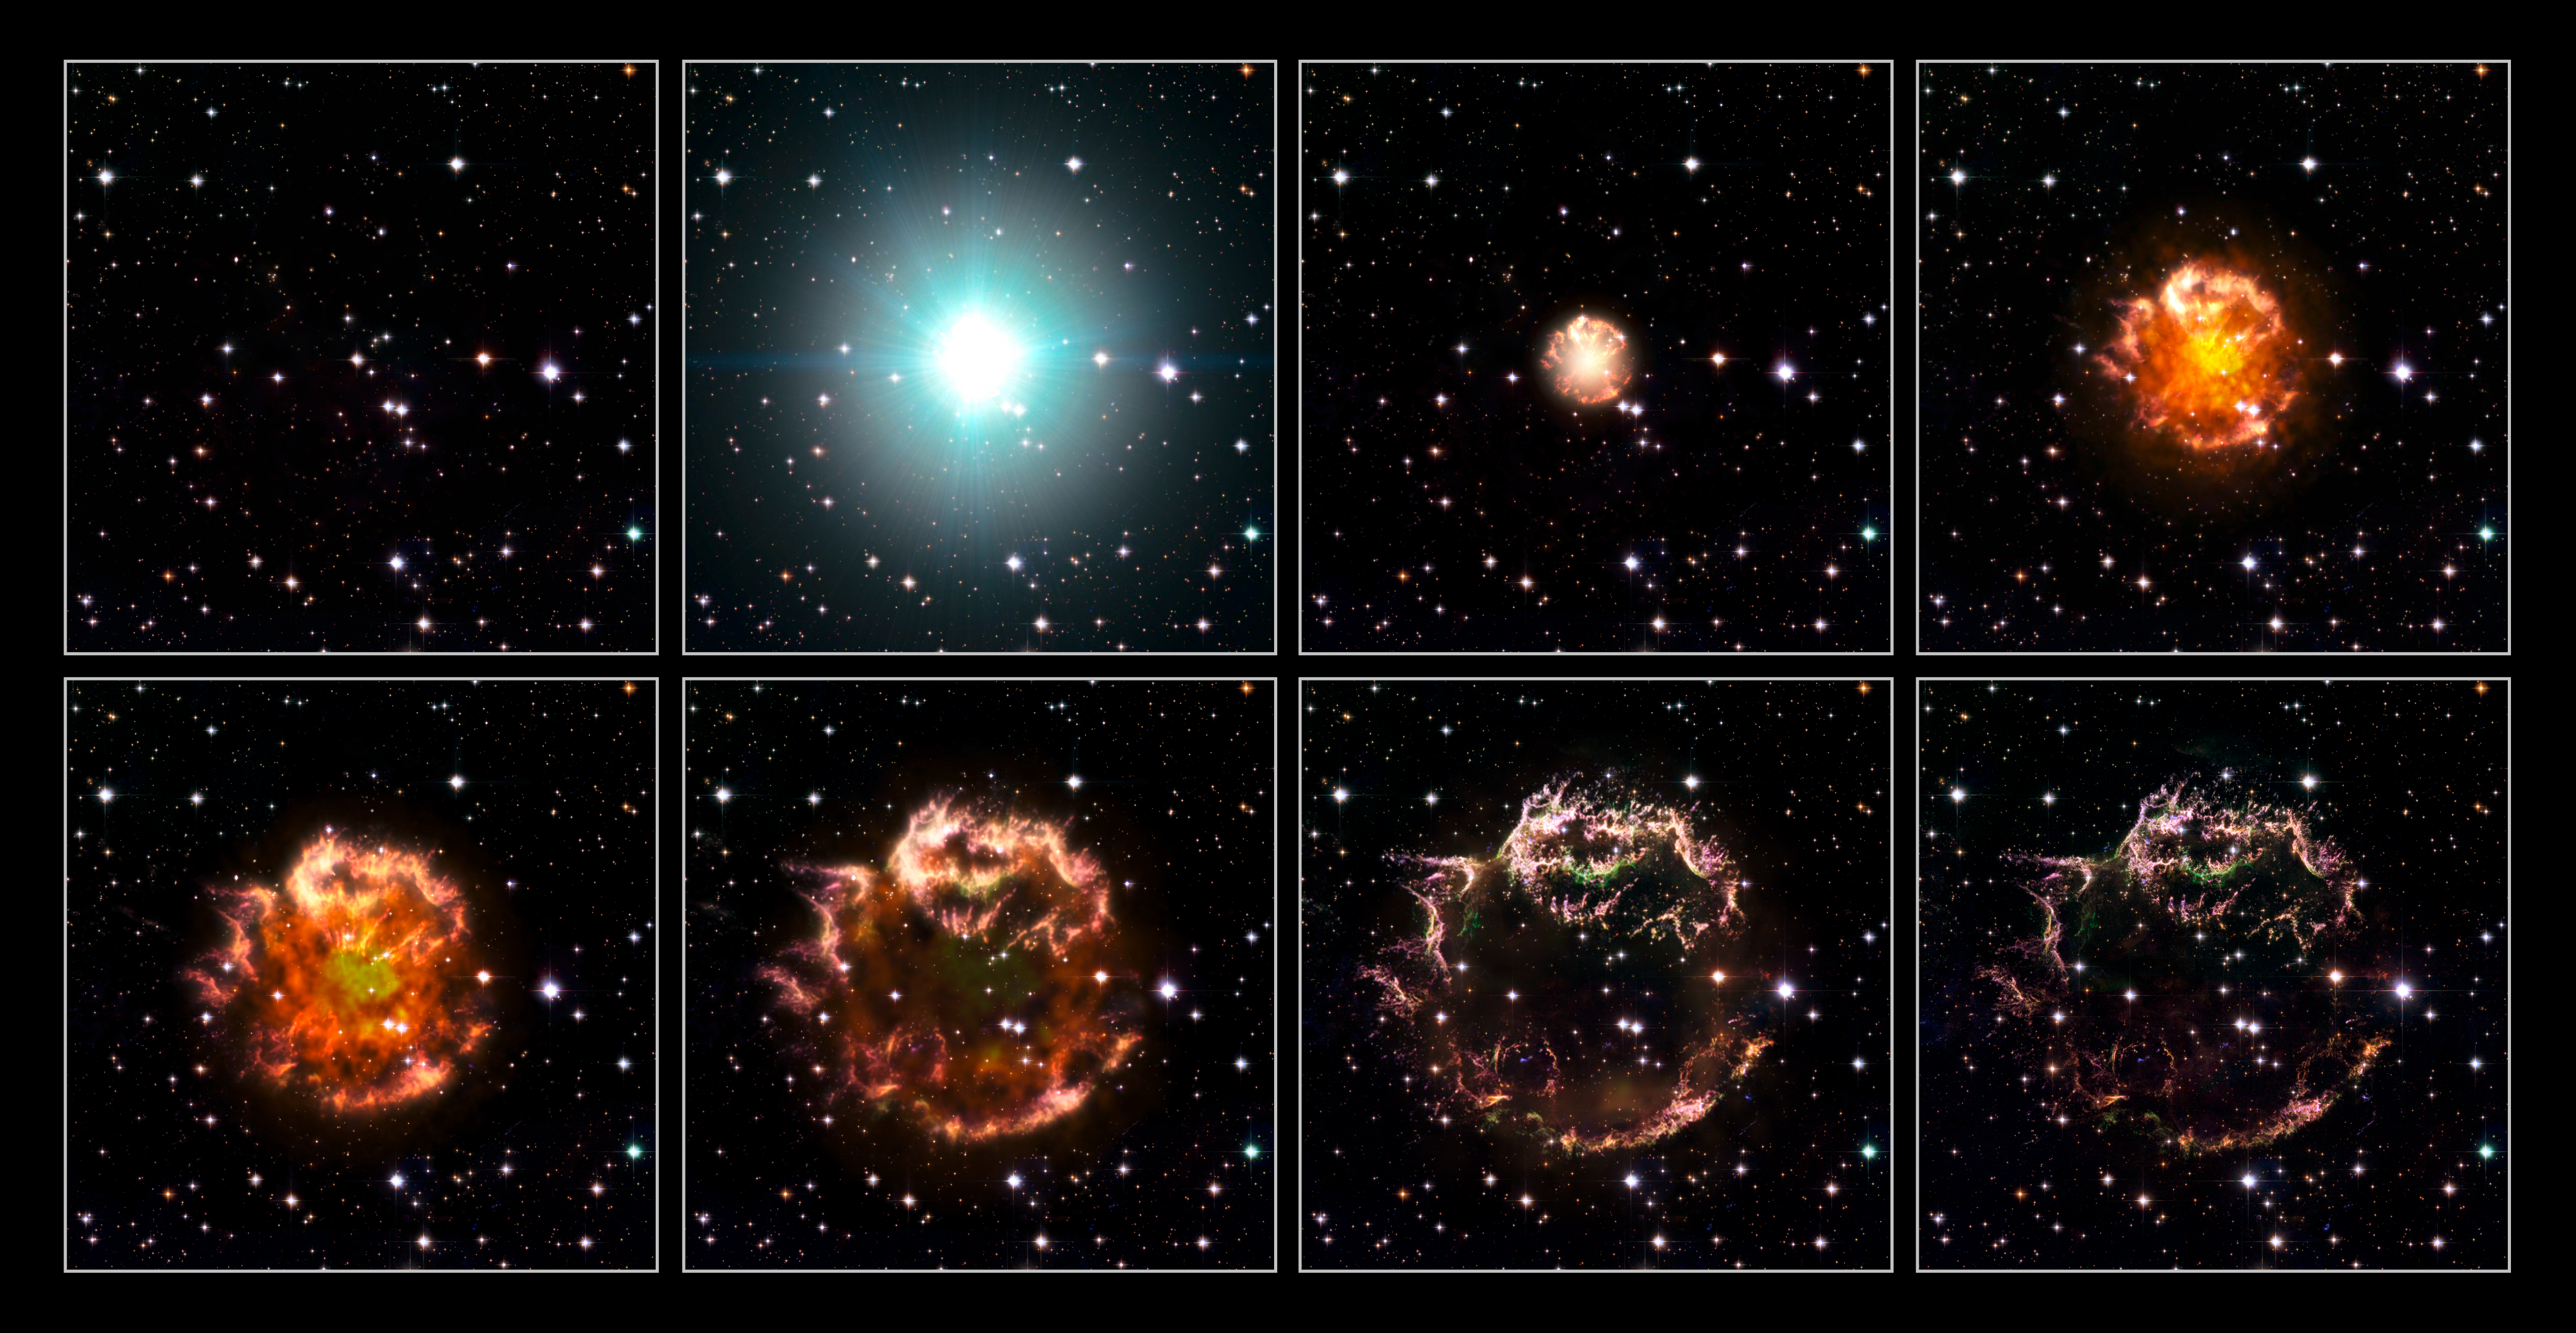

Cassiopeia A - Animation sequence [artist's impression]

Eight stills from the 3D supernova explosion animation (artist's impression).

Credit: NASA, ESA, and the Hubble Heritage (STScI/AURA)-ESA/Hubble Collaboration. Acknowledgement: Robert A. Fesen (Dartmouth College, USA) and James Long (ESA/Hubble)